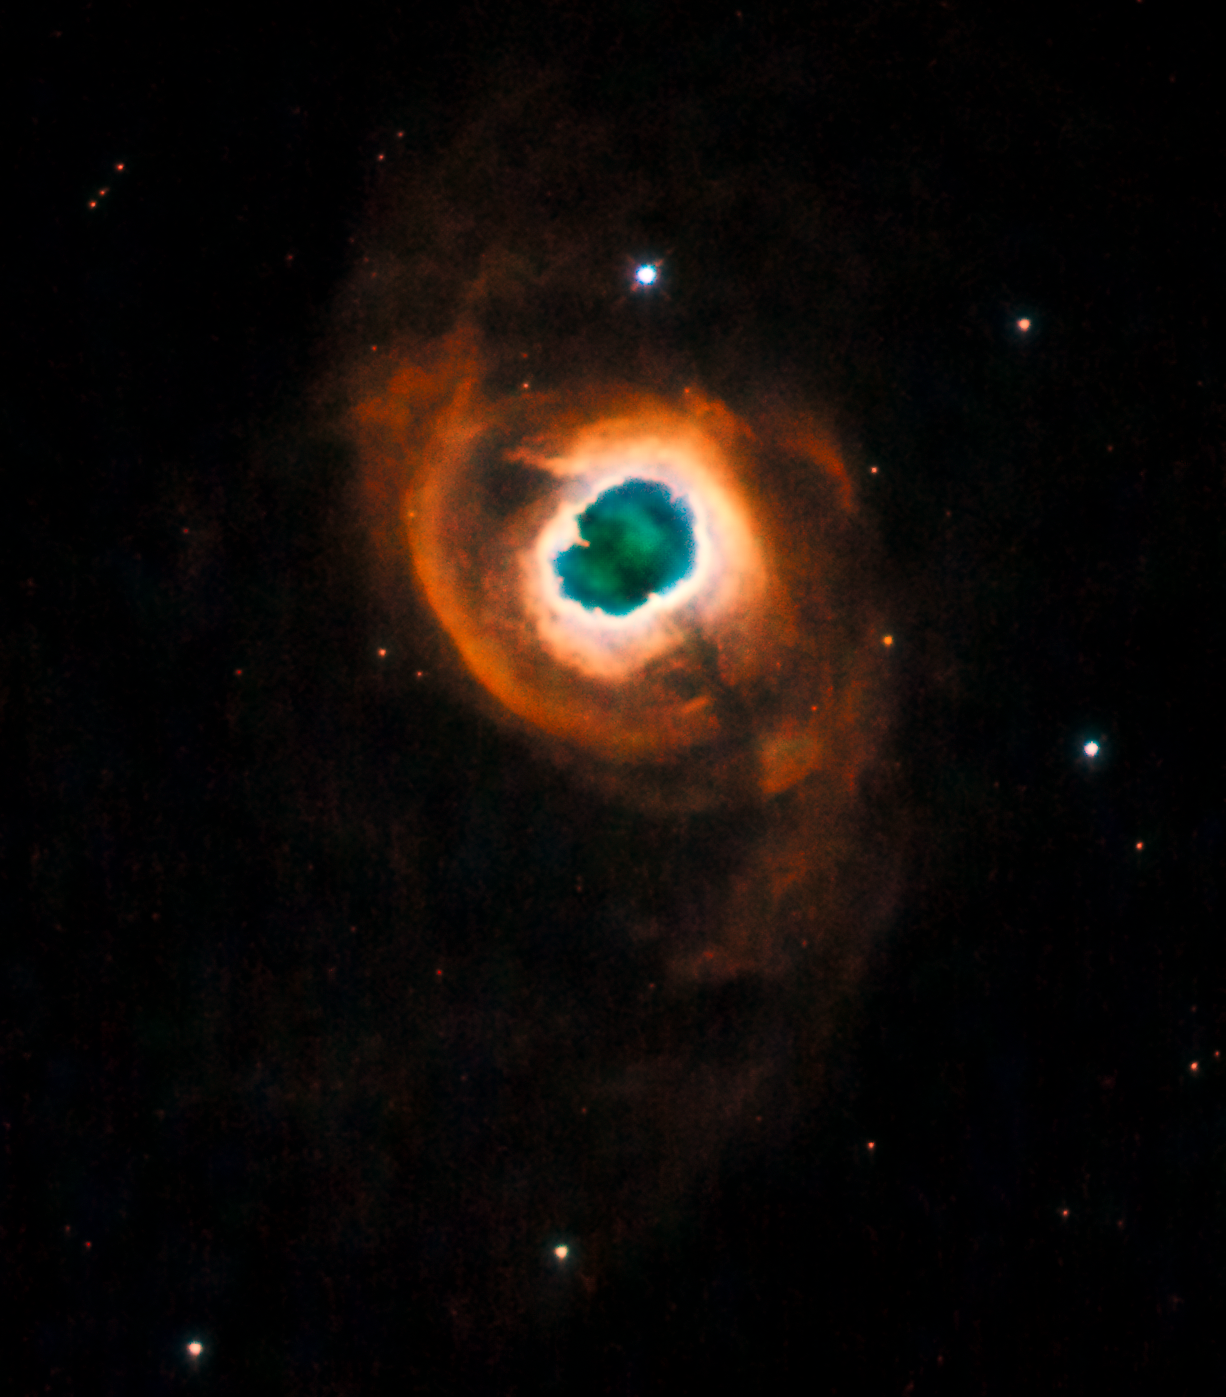

Planetary nebula K 4-55

The Hubble community bids farewell to the soon-to-be decommissioned Wide Field Planetary Camera 2 (WFPC2) onboard the Hubble Space Telescope. In tribute to Hubble's longest running optical camera, a planetary nebula has been imaged as WFPC2's final "pretty picture".

This planetary nebula is known as Kohoutek 4-55 (or K 4-55). It is one of a series of planetary nebulae that were named after their discoverer, Czech astronomer Luboš Kohoutek. A planetary nebula is formed from material in the outer layers of a red giant star that were expelled into interstellar space when the star was in the late stages of its life. Ultraviolet radiation emitted from the remaining hot core of the star ionises the ejected gas shells, causing them to glow.

In the specific case of K 4-55, a bright inner ring is surrounded an asymmetric, fainter layer. The entire system is then surrounded by a faint red halo of light emitted by ionised nitrogen. This multi-shell structure is fairly uncommon in planetary nebulae.

Credit: NASA, ESA and the Hubble Heritage Team (STScI/AURA). Acknowledgment: R. Sahai and J. Trauger (Jet Propulsion Laboratory)